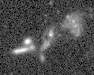

Galaxies: snapshots in time

Single images from the Galaxies: Snapshots in Time collage.

Credit: NASA & ESA